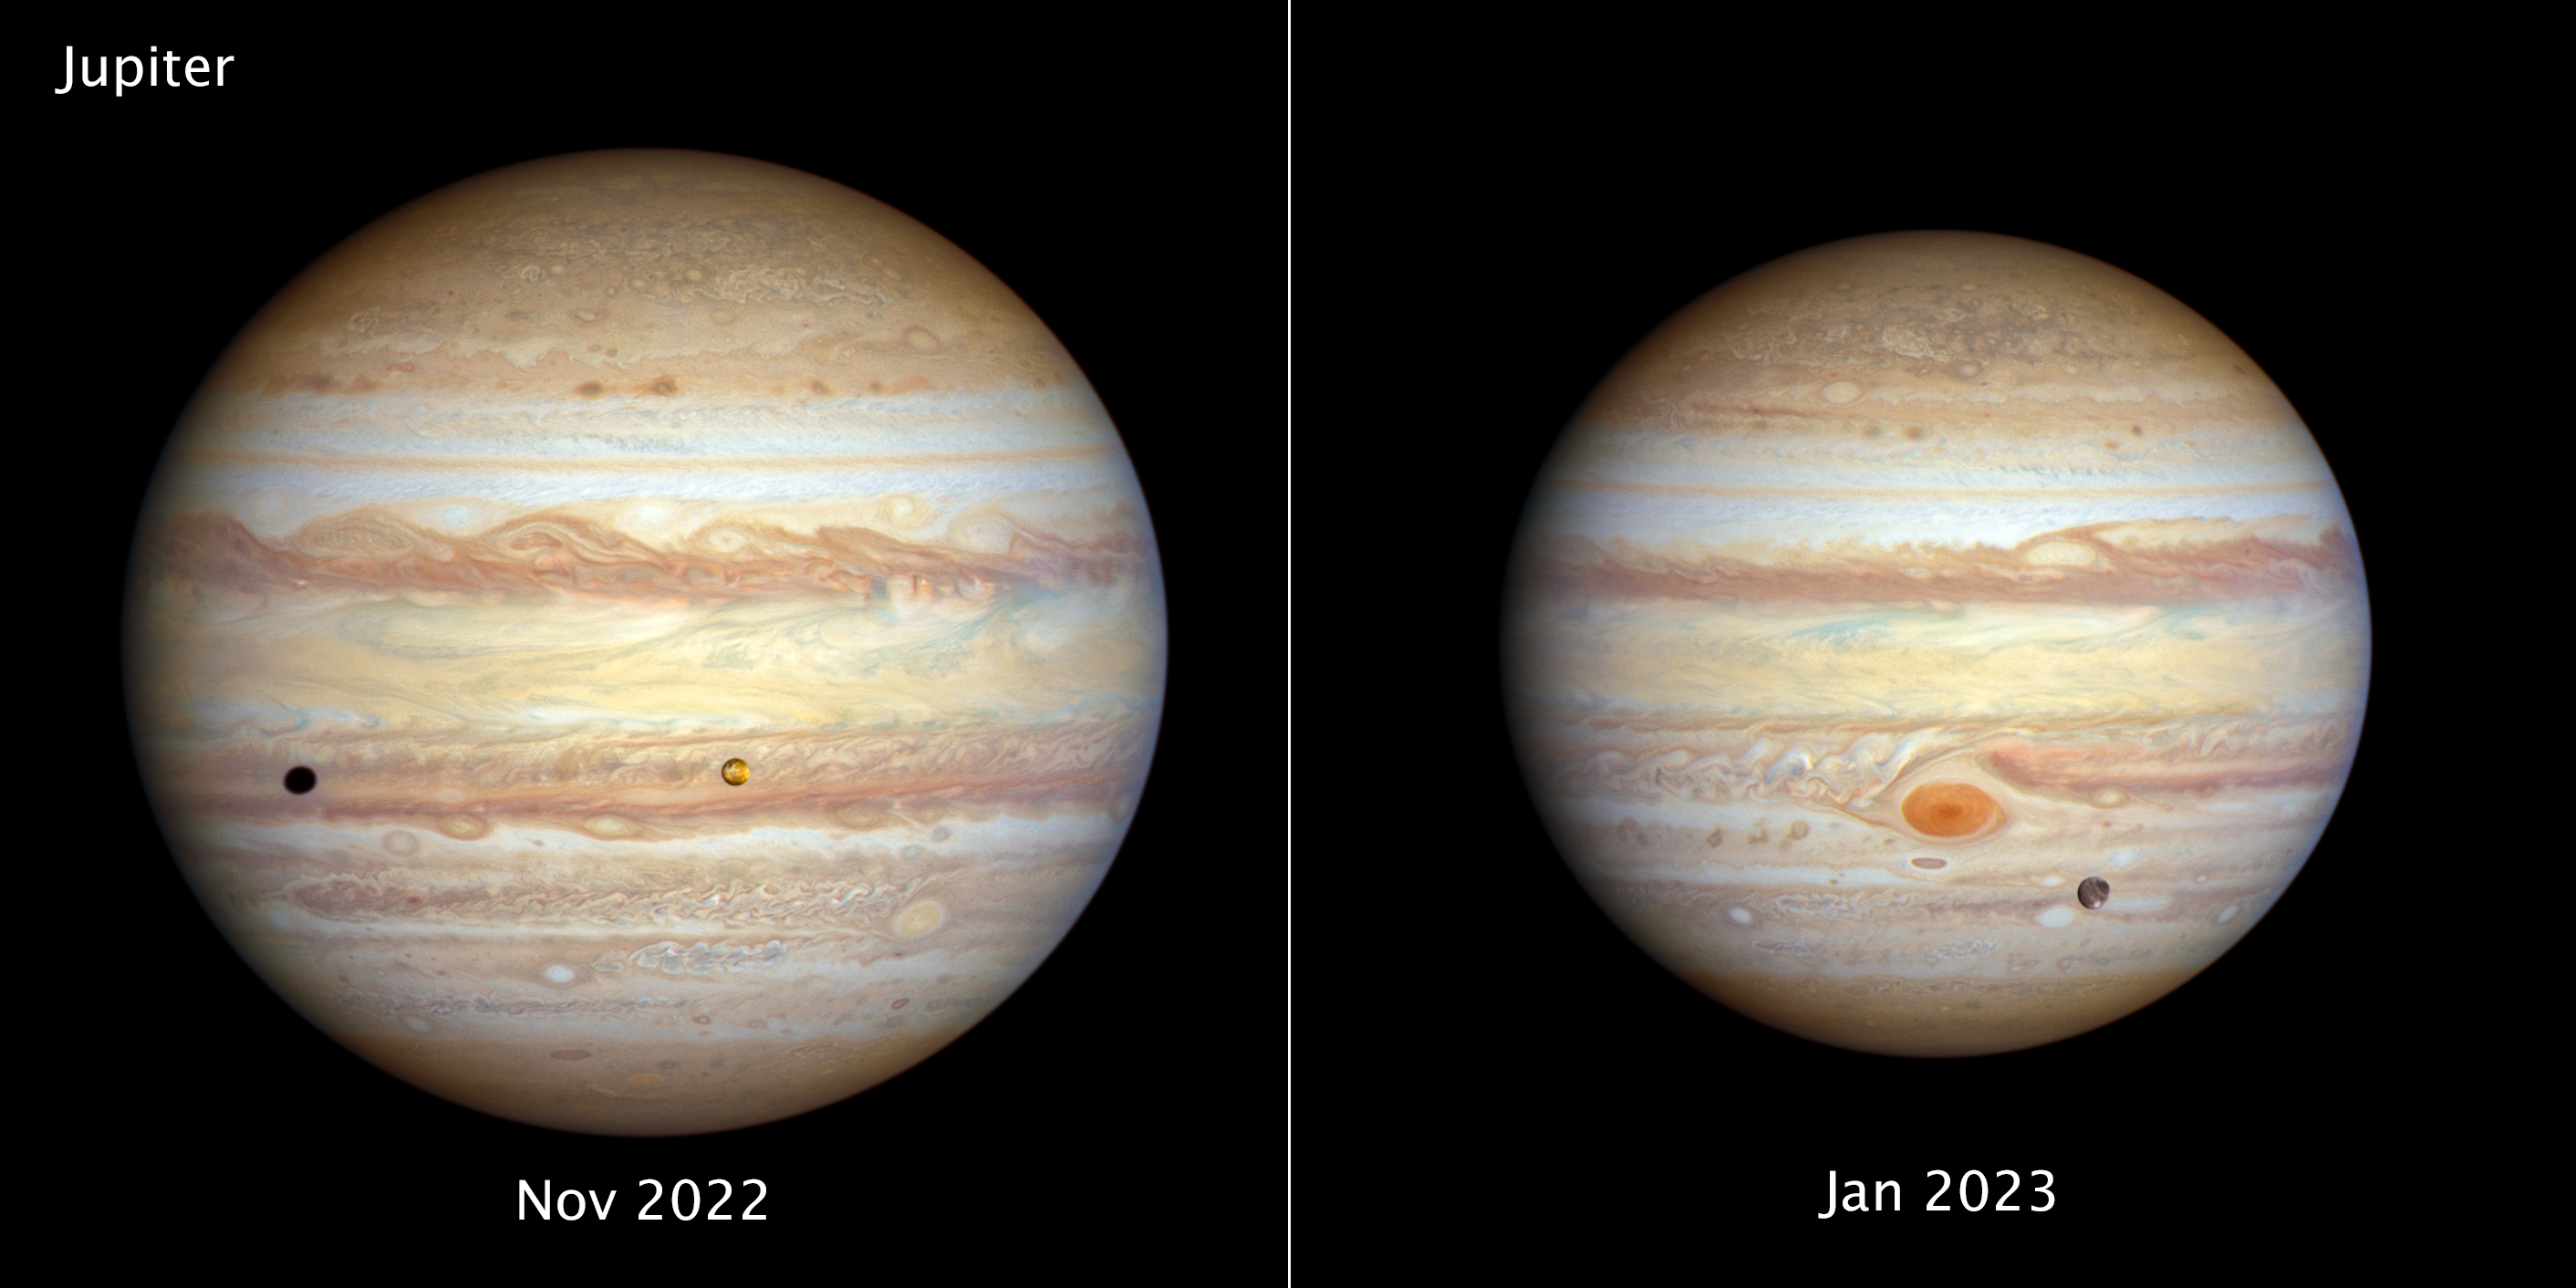

Jupiter (November 2022 and January 2023)

[LEFT] - The forecast for Jupiter is for stormy weather at low northern latitudes. A prominent string of alternating storms is visible, forming a ‘vortex street’ as some planetary astronomers call it. This is a wave pattern of nested cyclones and anticyclones, locked together like the alternating gears of a machine moving clockwise and counterclockwise. If the storms get close enough to each other and merge together, they could build an even larger storm, potentially rivalling the current size of the Great Red Spot. The staggered pattern of cyclones and anticyclones prevents individual storms from merging. Activity is also seen interior to these storms; in the 1990s Hubble didn’t see any cyclones or anticyclones with built-in thunderstorms, but these storms have sprung up in the last decade. Strong colour differences indicate that Hubble is seeing different cloud heights and depths as well.

The orange moon Io photobombs this view of Jupiter’s multicoloured cloud tops, casting a shadow toward the planet’s western limb. Hubble’s resolution is so sharp that it can see Io’s mottled-orange appearance, the result of its numerous active volcanoes. These volcanoes were first discovered when the Voyager 1 spacecraft flew by in 1979. The moon’s molten interior is overlaid by a thin crust through which the volcanoes eject material. Sulphur takes on various hues at different temperatures, which is why Io’s surface is so colourful. This image was taken on 12 November 2022.

[RIGHT] - Jupiter’s legendary Great Red Spot takes centre stage in this view. Though this vortex is big enough to swallow Earth, it has actually shrunk to the smallest size it has ever been according to observation records dating back 150 years. Jupiter’s icy moon Ganymede can be seen transiting the giant planet at lower right. Slightly larger than the planet Mercury, Ganymede is the largest moon in the Solar System. It is a cratered world and has a mainly water-ice surface with apparent glacial flows driven by internal heat. This image was taken on 6 January 2023.

This image is smaller in size because Jupiter was 130,000 kilometres farther from Earth when the image was taken.

Credit: NASA, ESA, STScI, A. Simon (NASA-GSFC), M. H. Wong (UC Berkeley), J. DePasquale (STScI)